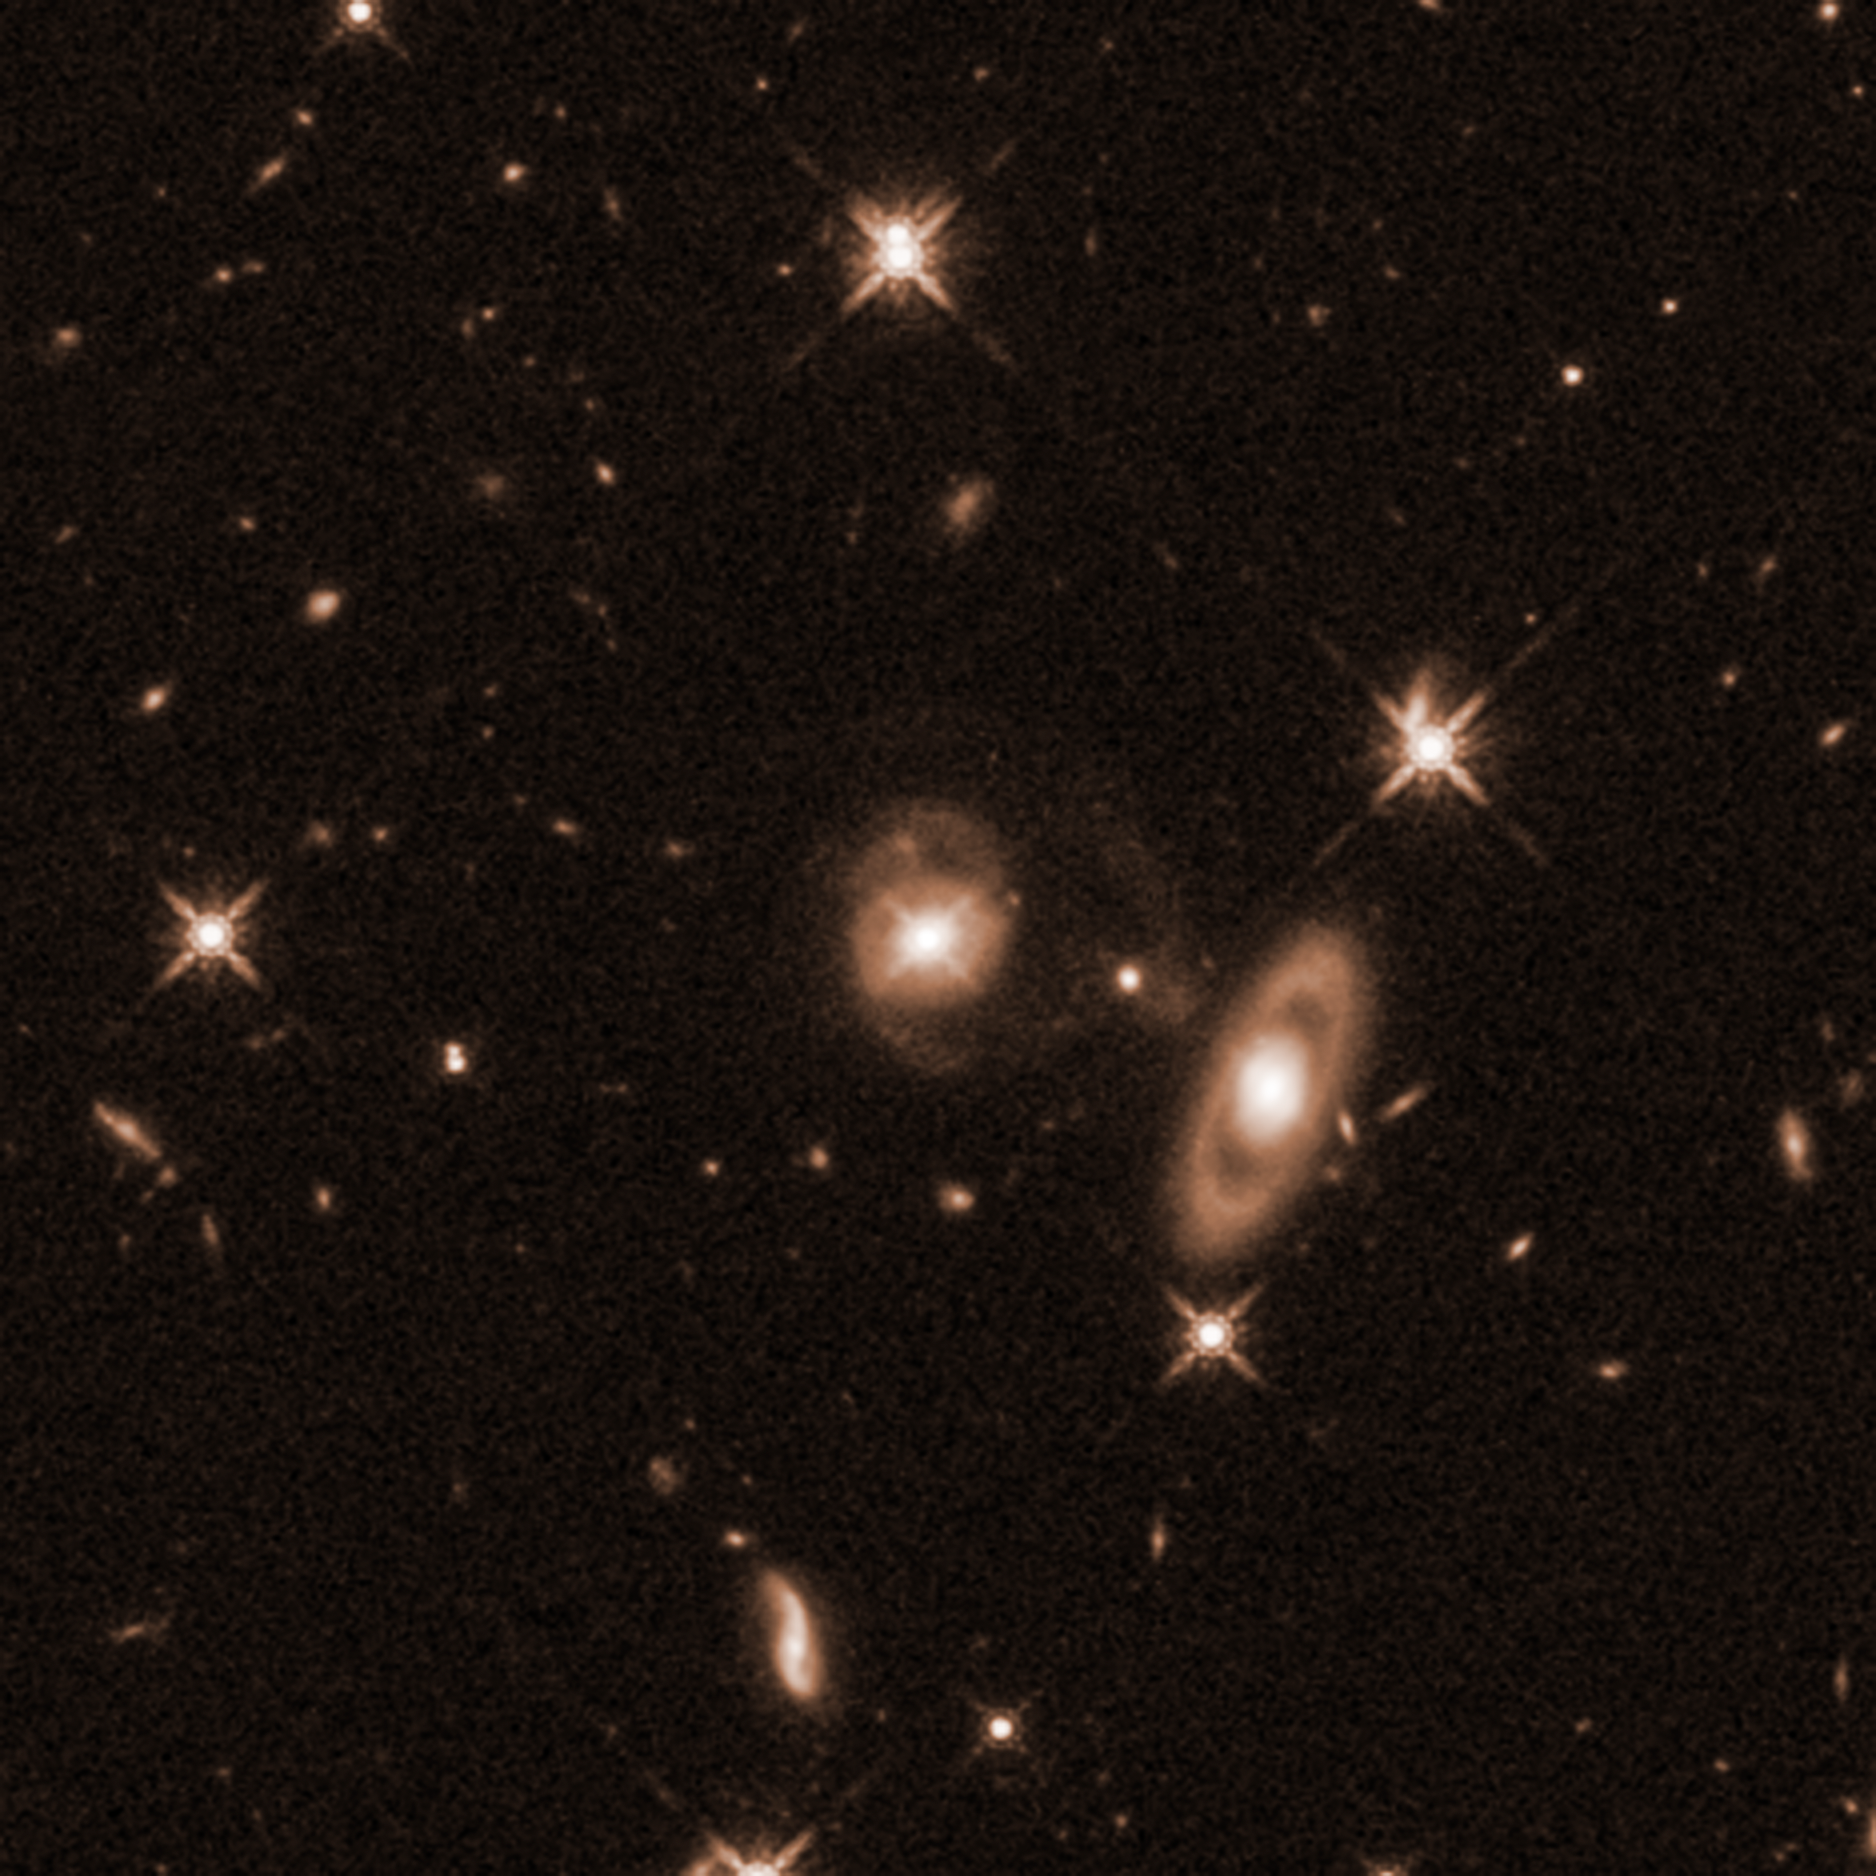

Quasar J0742+2704

Quasar J0742+2704 (center) became the subject of astronomers’ interest after it was discovered to have a newborn jet blasting from the disk around its supermassive black hole in 2020, using the Karl G. Jansky Very Large Array (VLA) radio observatory. This led to follow-up with other observatories in an effort to determine the properties of the galaxy and what may have triggered the jet.

While the jet itself cannot be seen in this NASA/ESA Hubble Space Telescope infrared-light image, the spiral shape of J0742+2704 is clear, with faint but detectable arms branching above and below the galaxy center. This was a big surprise to the research team, as quasars hosting jets are typically elliptical-shaped, and it is suspected that messy mergers with other galaxies are what funnel gas toward the black hole and fuel jets. These mergers would also disrupt any spiral formation a galaxy may have had before mixing its contents with another galaxy.

Though its intact spiral shape means it has not experienced a major merger, Hubble does show evidence that its lower arm has been disrupted, possibly by the tidal forces of interaction with another galaxy. This could mean that jets can be triggered by a far less involved, dramatic interaction of galaxies than a full merger. The large galaxy to the lower right of the quasar appears to be a ring galaxy, another sign of interaction. Ring galaxies form after a small galaxy passes through the center of a larger galaxy, reconfiguring its gas and dust.

The brightest parts of this image — foreground stars and the bright center of the quasar — show the characteristic “starry” spikes produced by Hubble (and other telescopes’) interior structure. They are not actual aspects of the cosmic objects

Credit: NASA, ESA, K. Nyland (United States Naval Research Laboratory), J. DePasquale (STScI)